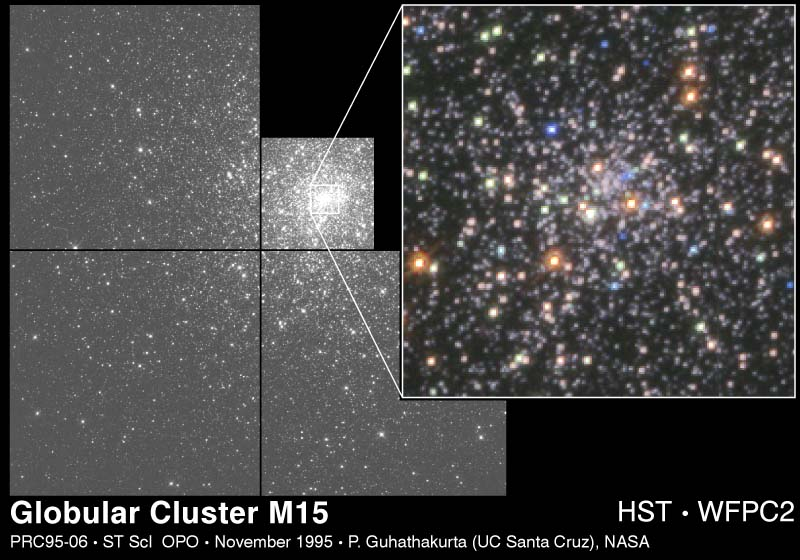

Globular Cluster M 15

This mosaic of the globular cluster M15 (fifteenth object in the Messier catalog of star clusters and nebulae) contains over 30, 000 stars. The Hubble Space Telescope probed the core of M15, the most tightly packed cluster of stars in our galaxy, to look for evidence of either a massive black hole or another remarkable phenomenon: a 'core collapse' driven by the intense gravitational pull of so many stars in such a small volume of space.

Credit: P. Guhathakurta (UCO/Lick Observatory, UC Santa Cruz), B. Yanny (Fermi National Accelerator Lab), D. Schneider (Pennsylvania State Univ.), J. Bahcall (Inst. for Advanced Study), and NASA/ESA